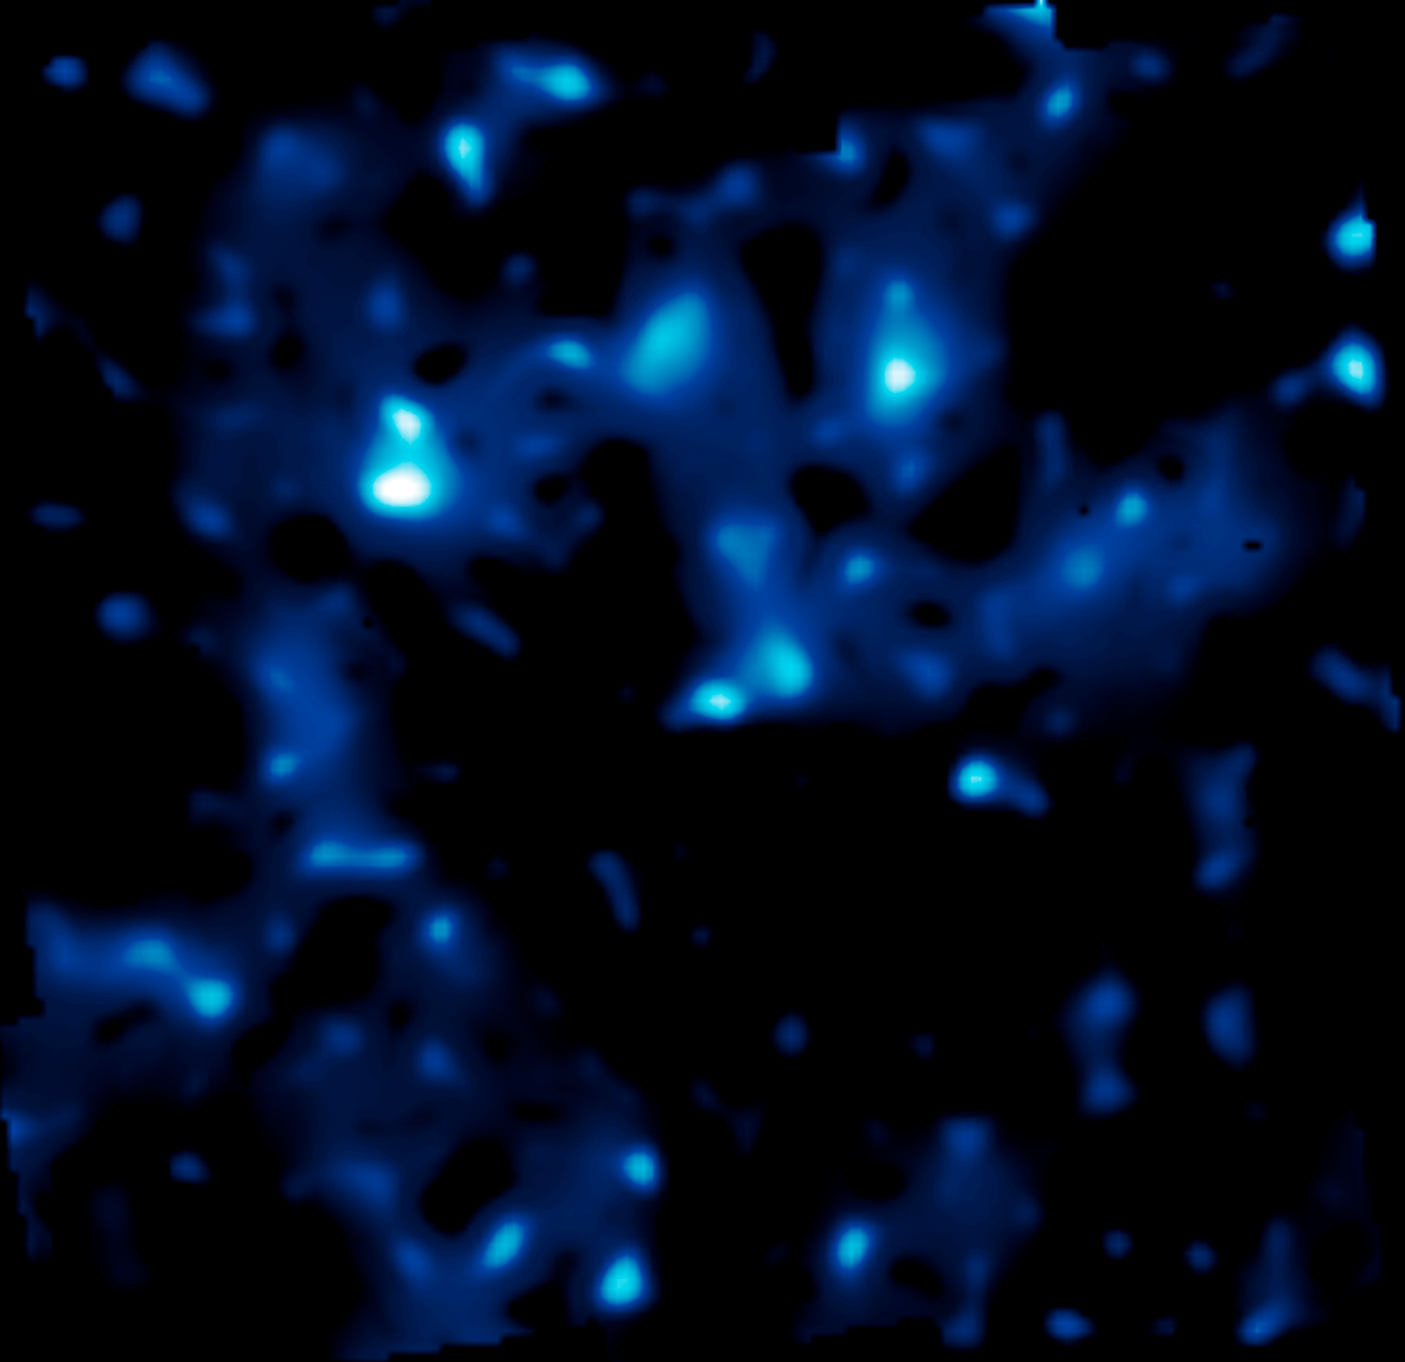

Large scale structure of dark matter

This shows the distribution of dark matter in the Universe. The brightness of clumps corresponds to the density of mass. The map covers an area of sky nine times the angular diameter of the full Moon, and is the largest sample of the distribution of dark matter ever obtained. It demonstrates how normal matter - including stars, galaxies and gas - is built inside an underlying scaffolding of dark matter. The comparison of dark matter and normal matter will provide critical observational underpinnings to future theories for how structure formed in the evolving Universe under the relentless pull of gravity.

The map was derived from the Hubble Space Telescope's largest ever survey of the Universe, the Cosmic Evolution Survey ("COSMOS"), carried out by an international team of 70 astronomers. In making the COSMOS survey, Hubble photographed 575 adjacent and slightly overlapping views of the universe using theAdvanced Camera for Surveys' (ACS) Wide Field Camera onboard Hubble. It took nearly 1,000 hours of observations. The distances to the galaxies were determined from their spectral redshifts, using ESO's Very Large Telescope, the Subaru and CFHT telescopes in Hawaii and the Magellan telescope in Chile.

Credit: NASA, ESA and R. Massey (California Institute of Technology)